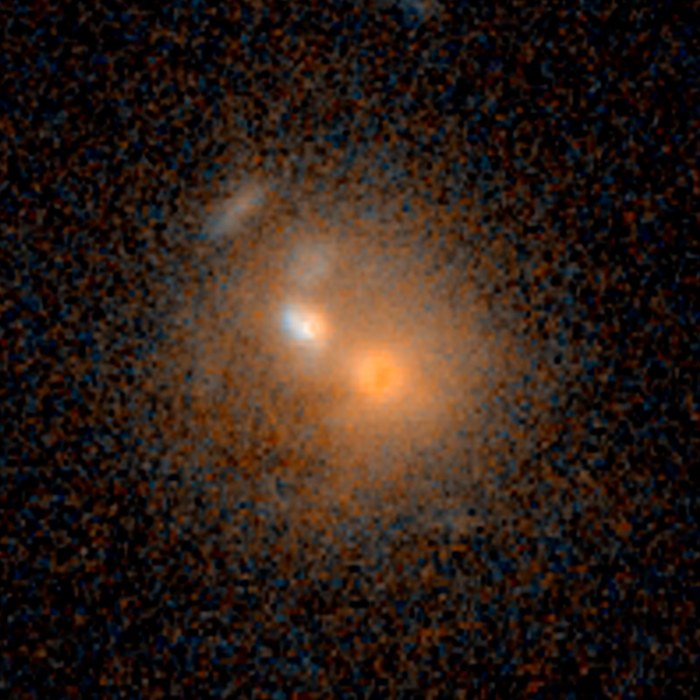

Merging galaxies — 3 billion light-years from Earth

Merging galaxies — 3 billion light-years from Earth.

Credit: NASA, ESA, and J. Lotz (STScI)